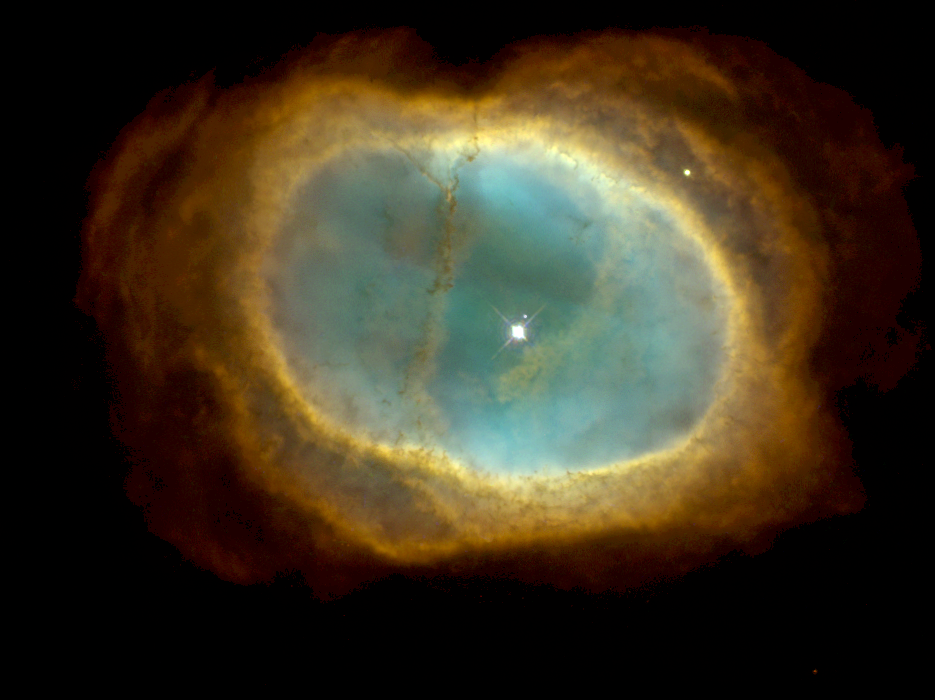

A glowing pool of light

NGC 3132 is a striking example of a planetary nebula. This expanding cloud of gas, surrounding a dying star, is known to amateur astronomers in the southern hemisphere as the 'Eight-Burst' or the 'Southern Ring' Nebula.

Credit: Hubble Heritage Team (STScI/AURA/NASA/ESA)